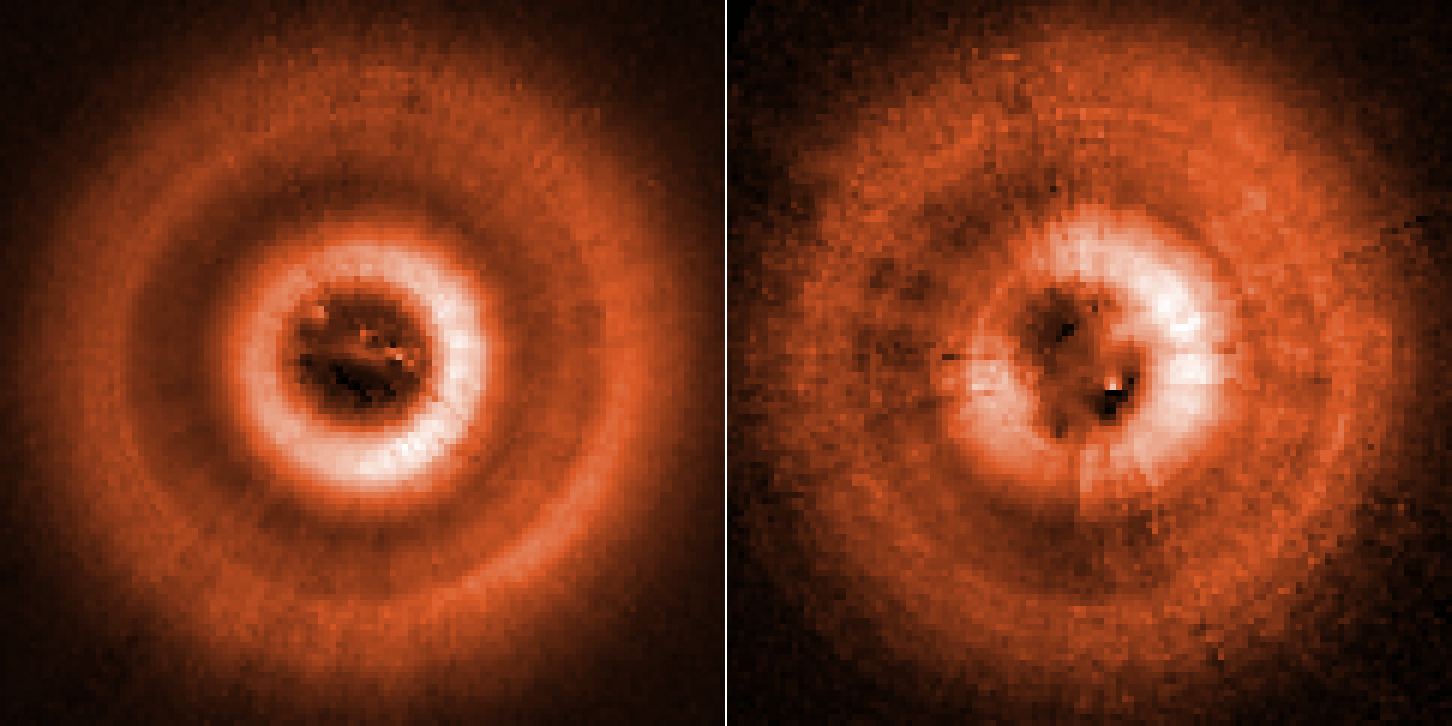

Hubble images TW Hydrae Disc Shadows (clean)

Comparison images from the NASA/ESA Hubble Space Telescope, taken several years apart, have uncovered two eerie shadows moving counterclockwise across a disc of gas and dust disc encircling the young star TW Hydrae. The discs are tilted face-on as seen from Earth and so give astronomers a bird’s-eye view of what’s happening around the star. The left image, taken in 2016, shows just one shadow at the 11 o’clock position. This shadow is cast by an inner disc that is slightly inclined to the outer disc and so blocks starlight. The picture on the left shows a second shadow that emerged from yet another nested disc at the 7 o’clock position, as photographed in 2021. The shadows rotate around the star at different rates like the hands of a clock. They are evidence for two unseen planets that have pulled dust into their orbits. This makes them slightly inclined to each other. This is a-visible light photo taken with the Space Telescope Imaging Spectrograph. Artificial colour has been added to enhance details.

Credit: NASA, ESA, J. Debes STScI